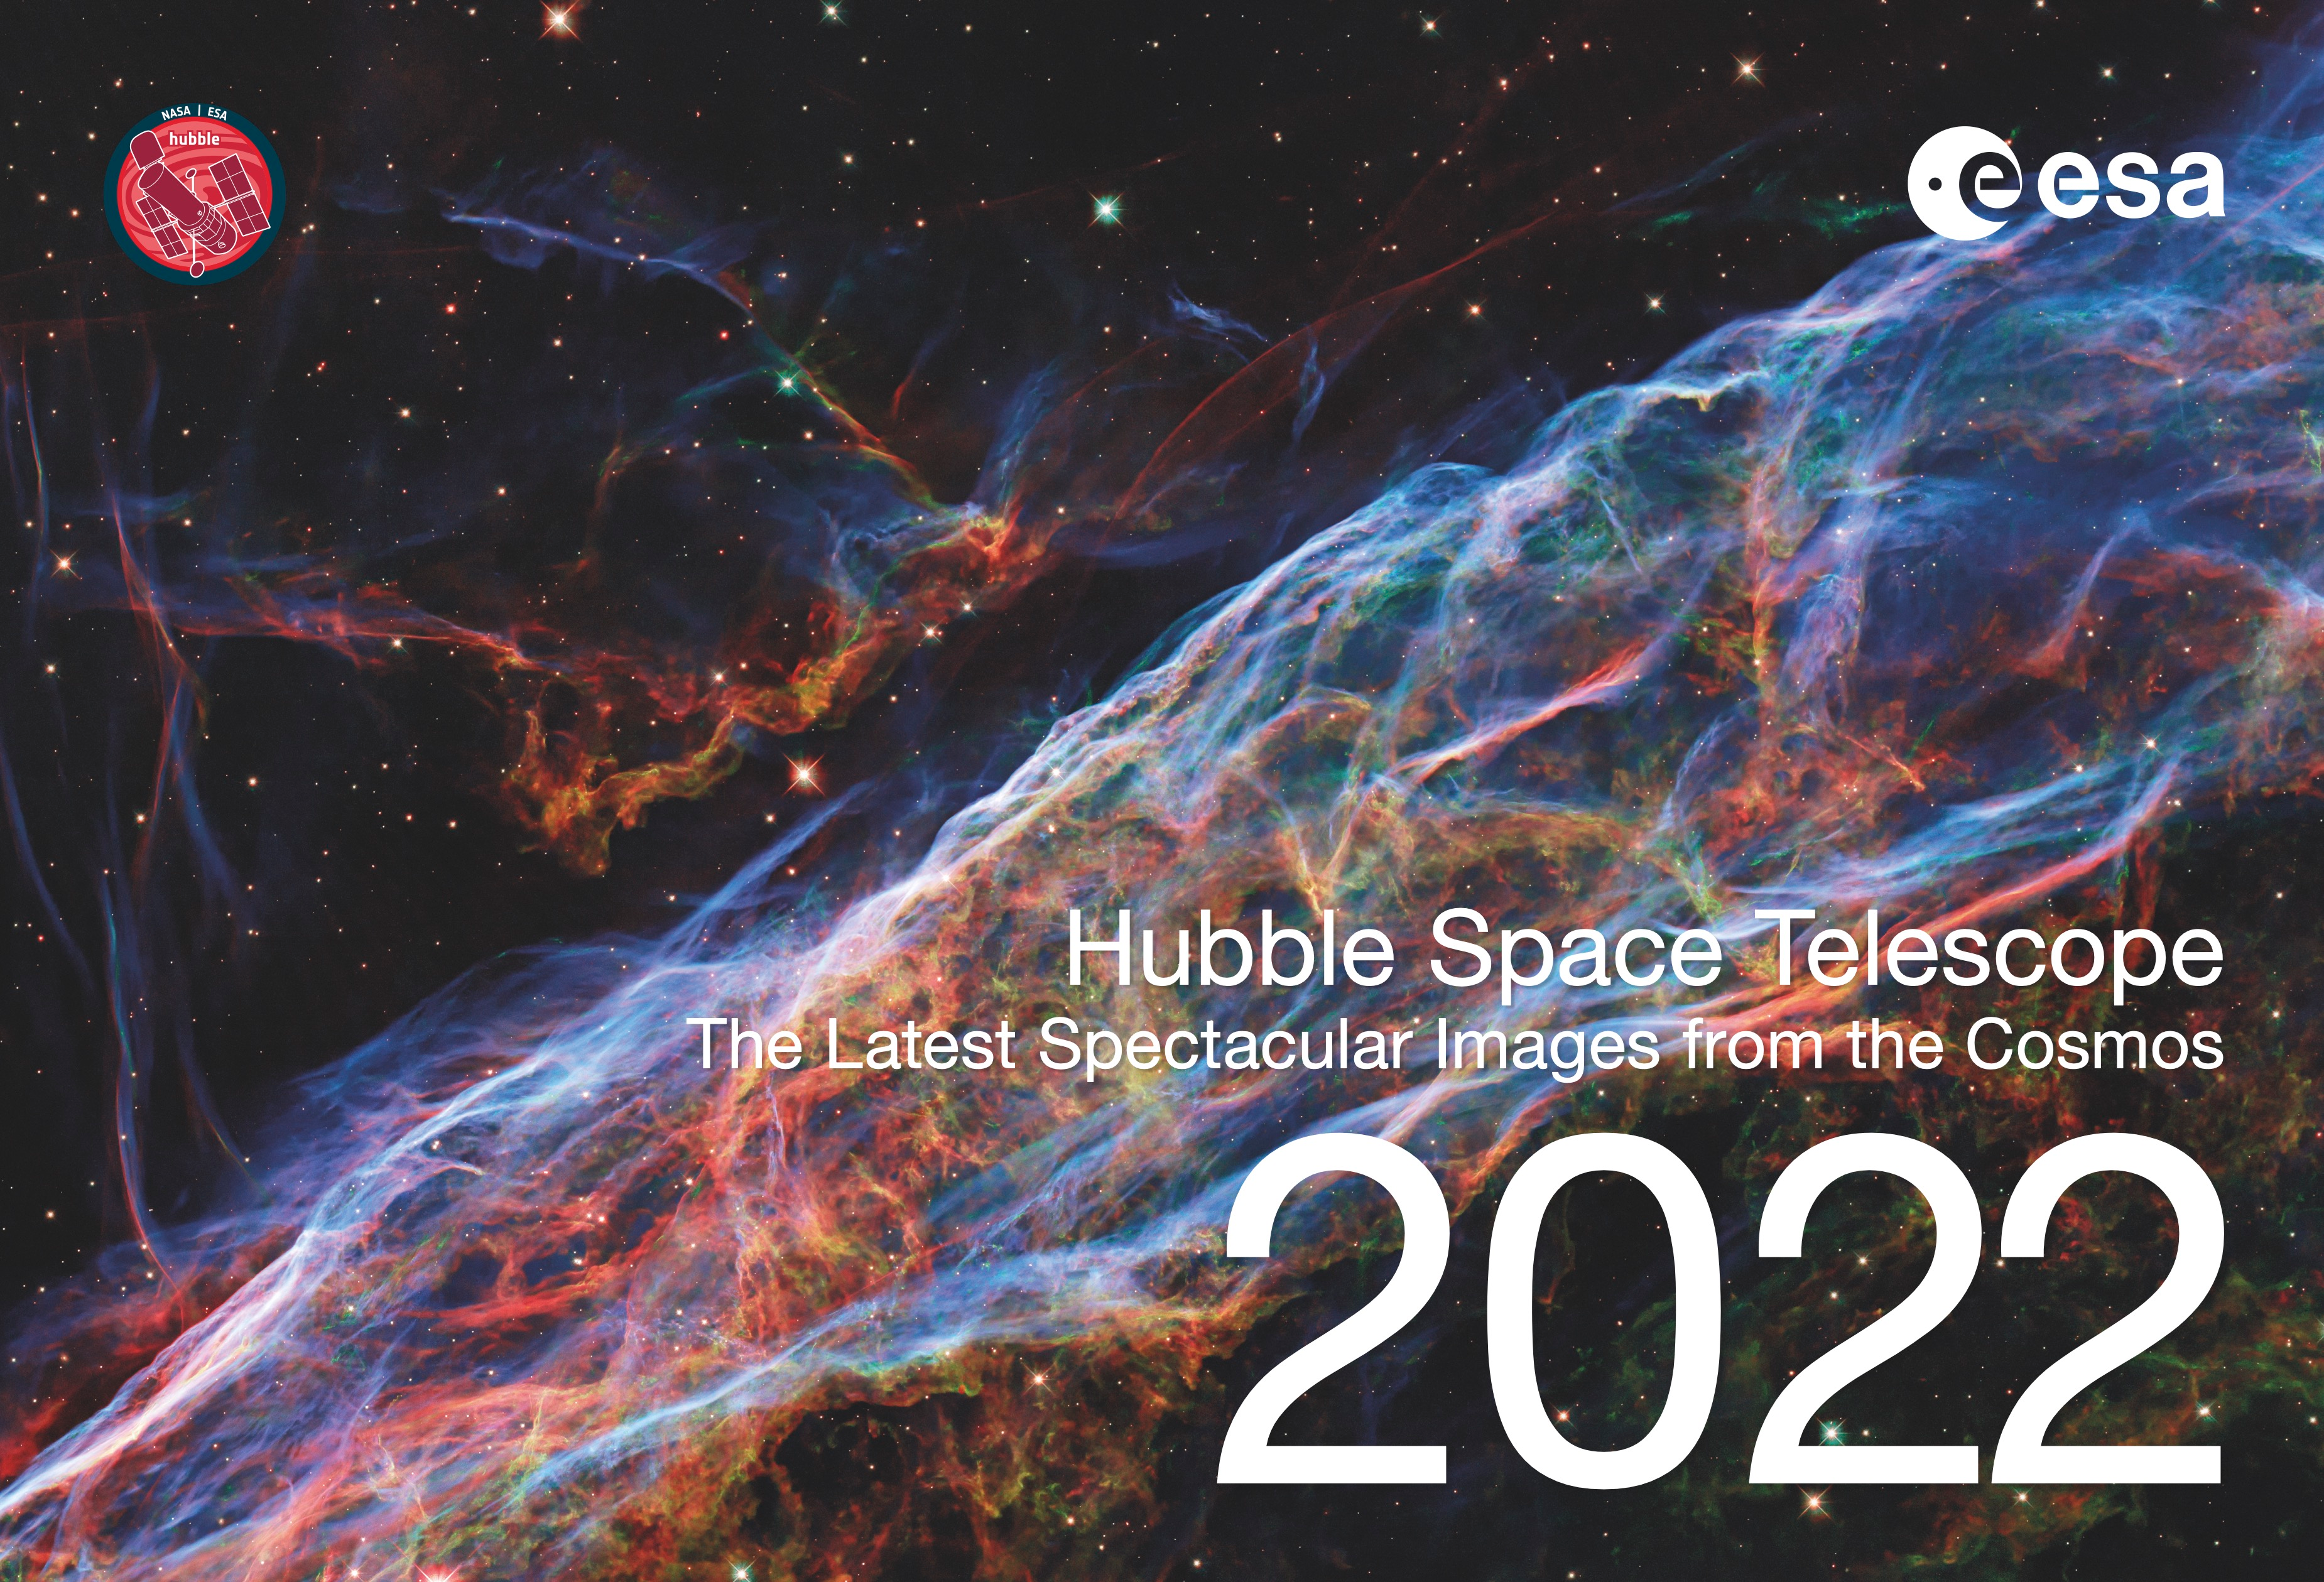

Cover Page of the 2022 ESA/Hubble Calendar

This is the cover page for the 2022 ESA/Hubble Calendar, featuring images released in 2021.

The electronic version of the calendar is available in digital (low and high resolution) and print-ready versions for everyone to share and enjoy.

Credit: ESA/Hubble